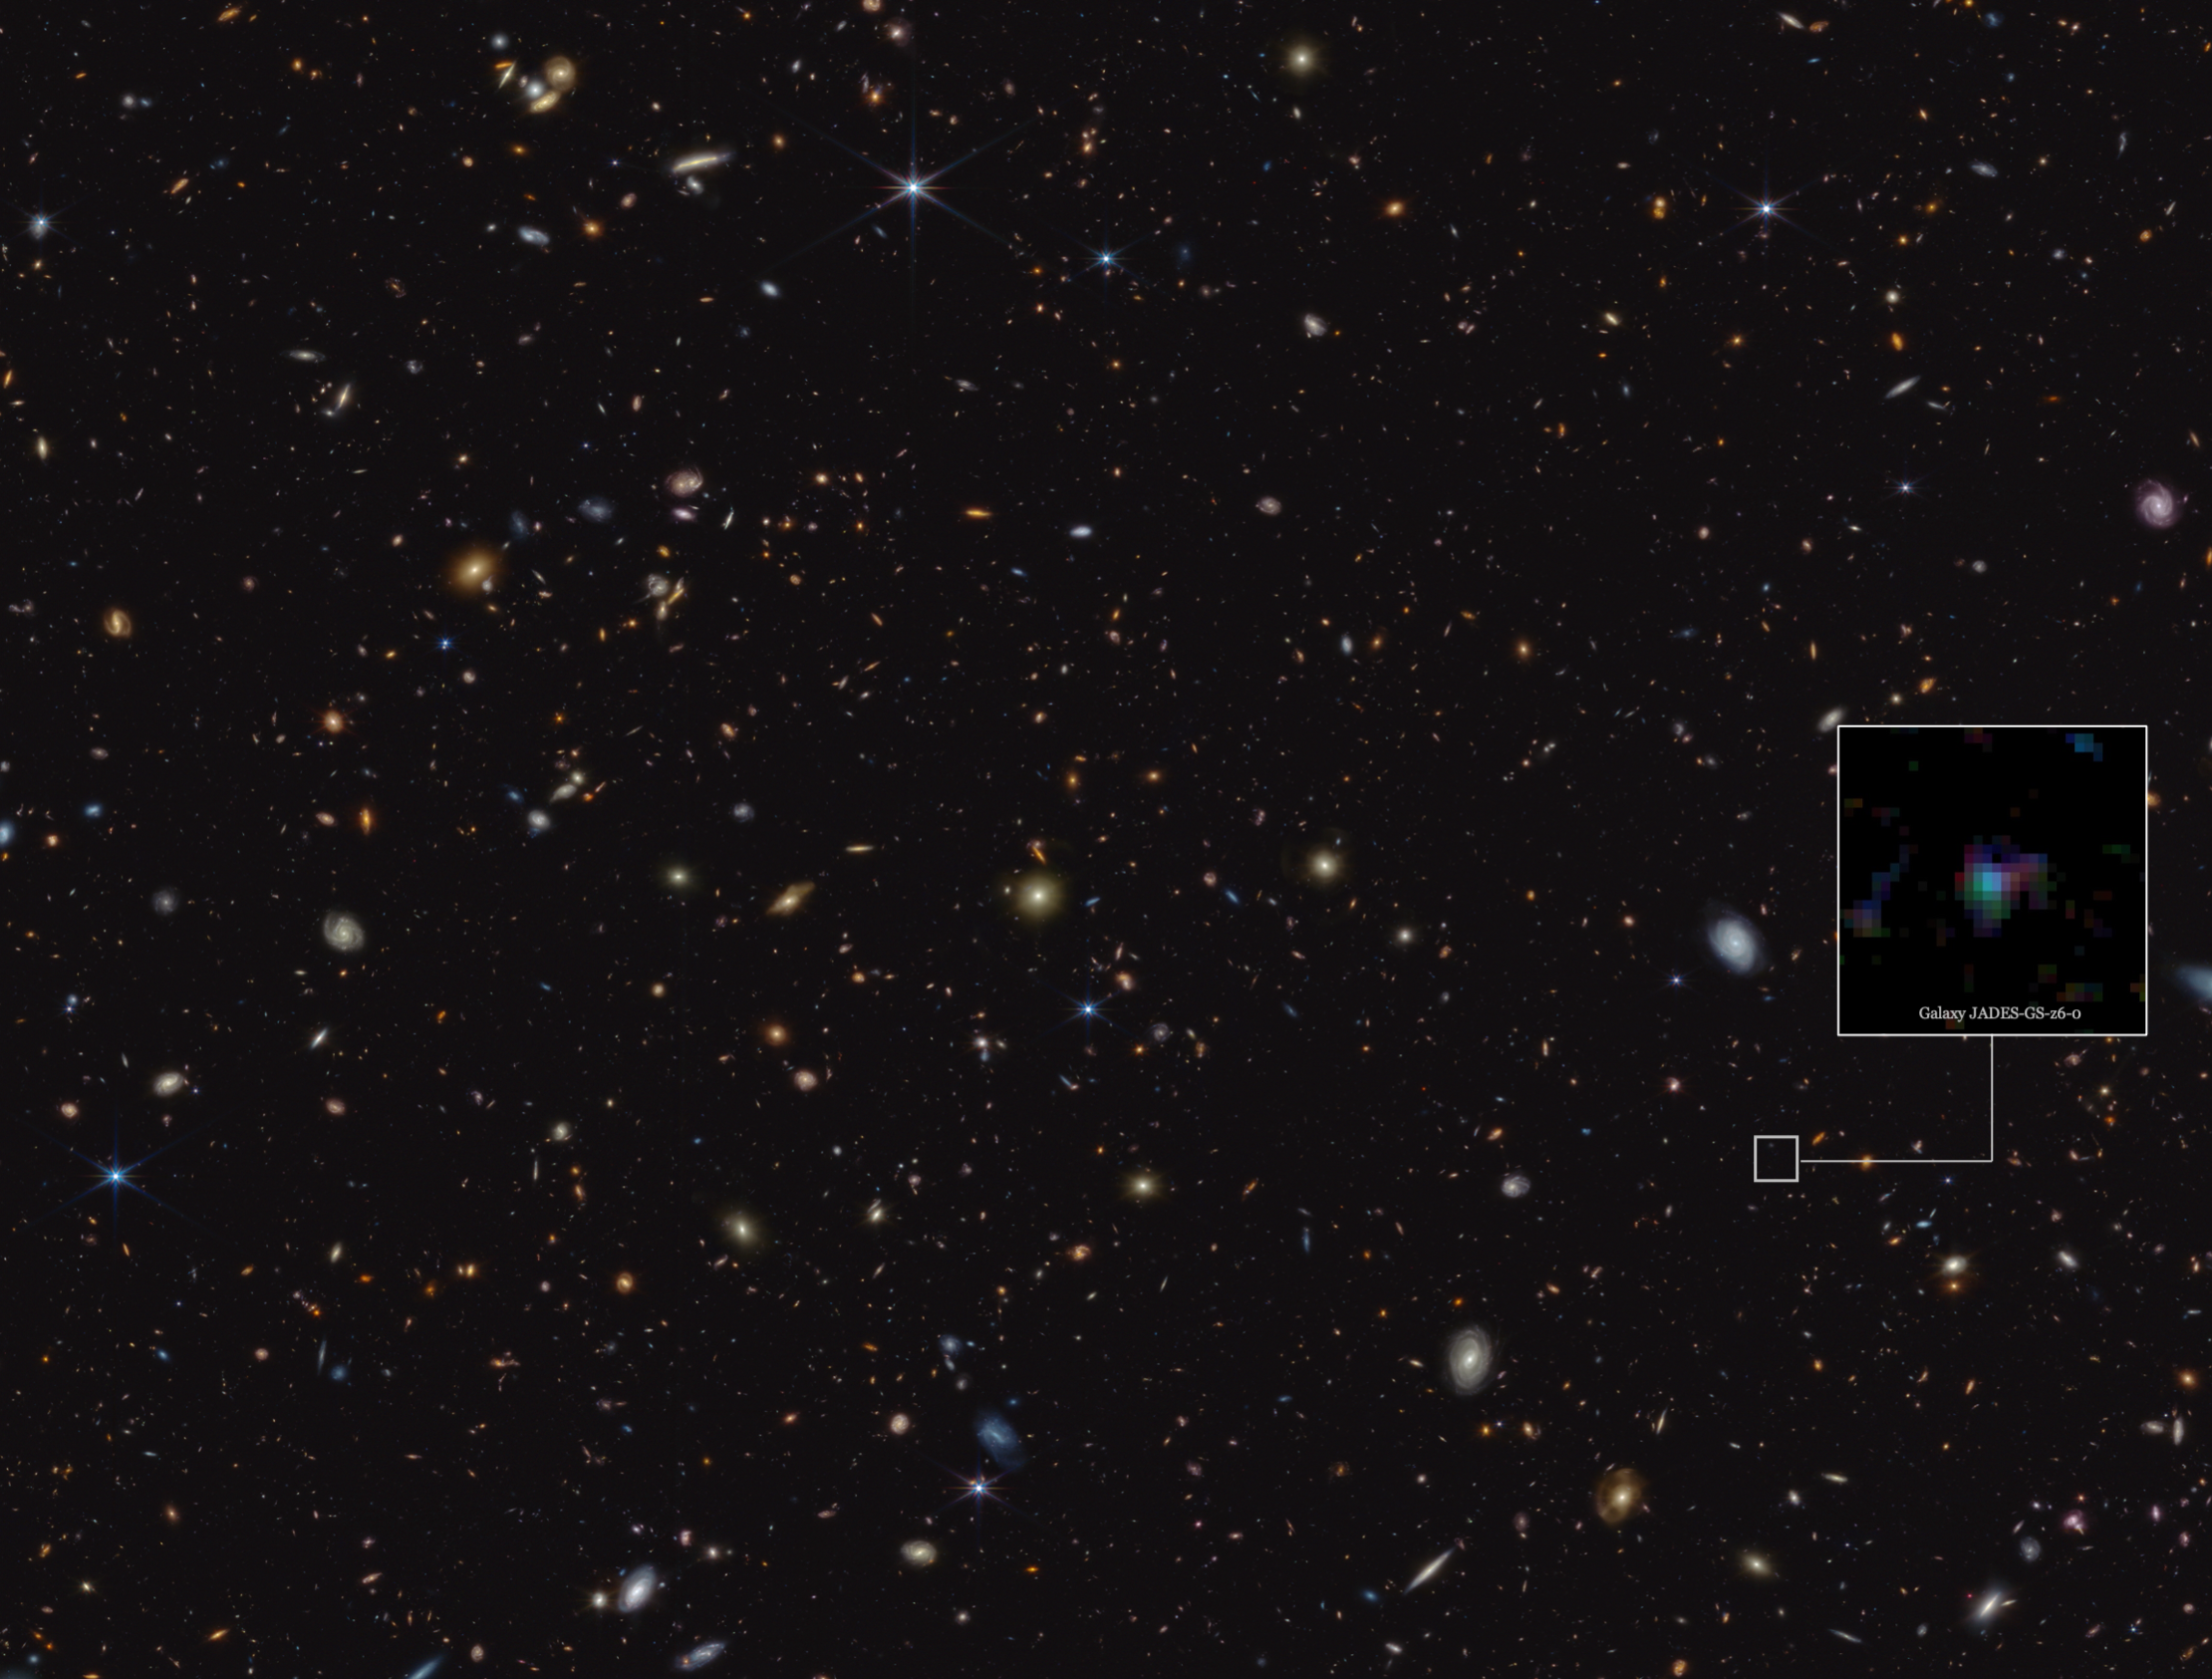

Galaxy JADES-GS-z6 in the GOODS-S field: JADES (NIRCam image)

This image highlights the location of the galaxy JADES-GS-z6 in a portion of an area of the sky known as GOODS-South, which was observed as part of the JWST Advanced Deep Extragalactic Survey, or JADES.

This galaxy, along with others in this region, were part of a Webb study by an international team of astronomers, who observed the chemical signature of carbon-rich dust grains at redshift ~7. This is roughly equivalent to one billion years after the birth of the Universe. Similar observational signatures have been observed in the much more recent Universe, attributed to complex, carbon-based molecules known as polycyclic aromatic hydrocarbons (PAHs). It is not thought likely, however, that PAHs would have developed within the first billion years of cosmic time. Therefore, this observation suggests the exciting possibility that Webb may have observed a different species of carbon-based molecule: possibly minuscule graphite- or diamond-like grains produced by the earliest stars or supernovae. This observation suggests exciting avenues of investigation into both the production of cosmic dust and the earliest stellar populations in our Universe, and was made possible by Webb’s unprecedented sensitivity.

The team’s research indicates that this particular galaxy showed significant dust obscuration and has undergone substantial metal enrichment relative to galaxies with similar mass at the same redshift. The team also believes the galaxy's visible colour gradient may indicate a peculiar geometrical alignment of stars and dust.

In this image, blue, green, and red were assigned to Webb’s NIRCam (Near-Infrared Camera) data at 0.9, 1.15, and 1.5 microns; 2.0, 2.77, and 3.55 microns; and 3.56, 4.1, and 4.44 microns (F090W, F115W, and F150W; F200W, F277W, and F335M; and F356W, F410M, and F444W), respectively.

The galaxy is shown zoomed in on a region measuring roughly 1x1 arcseconds, which is a measure of angular distance on the sky. One arcsecond is equal to 1/3600 of one degree of arc (the full Moon has an angular diameter of about 0.5 degrees). The actual size of an object that covers one arcsecond on the sky depends on its distance from the telescope.

Credit: ESA/Webb, NASA, ESA, CSA, B. Robertson (UC Santa Cruz), B. Johnson (Center for Astrophysics, Harvard & Smithsonian), S. Tacchella (University of Cambridge), M. Rieke (Univ. of Arizona), D. Eisenstein (Center for Astrophysics, Harvard & Smithsonian), A. Pagan (STScI), J. Witstok (University of Cambridge)